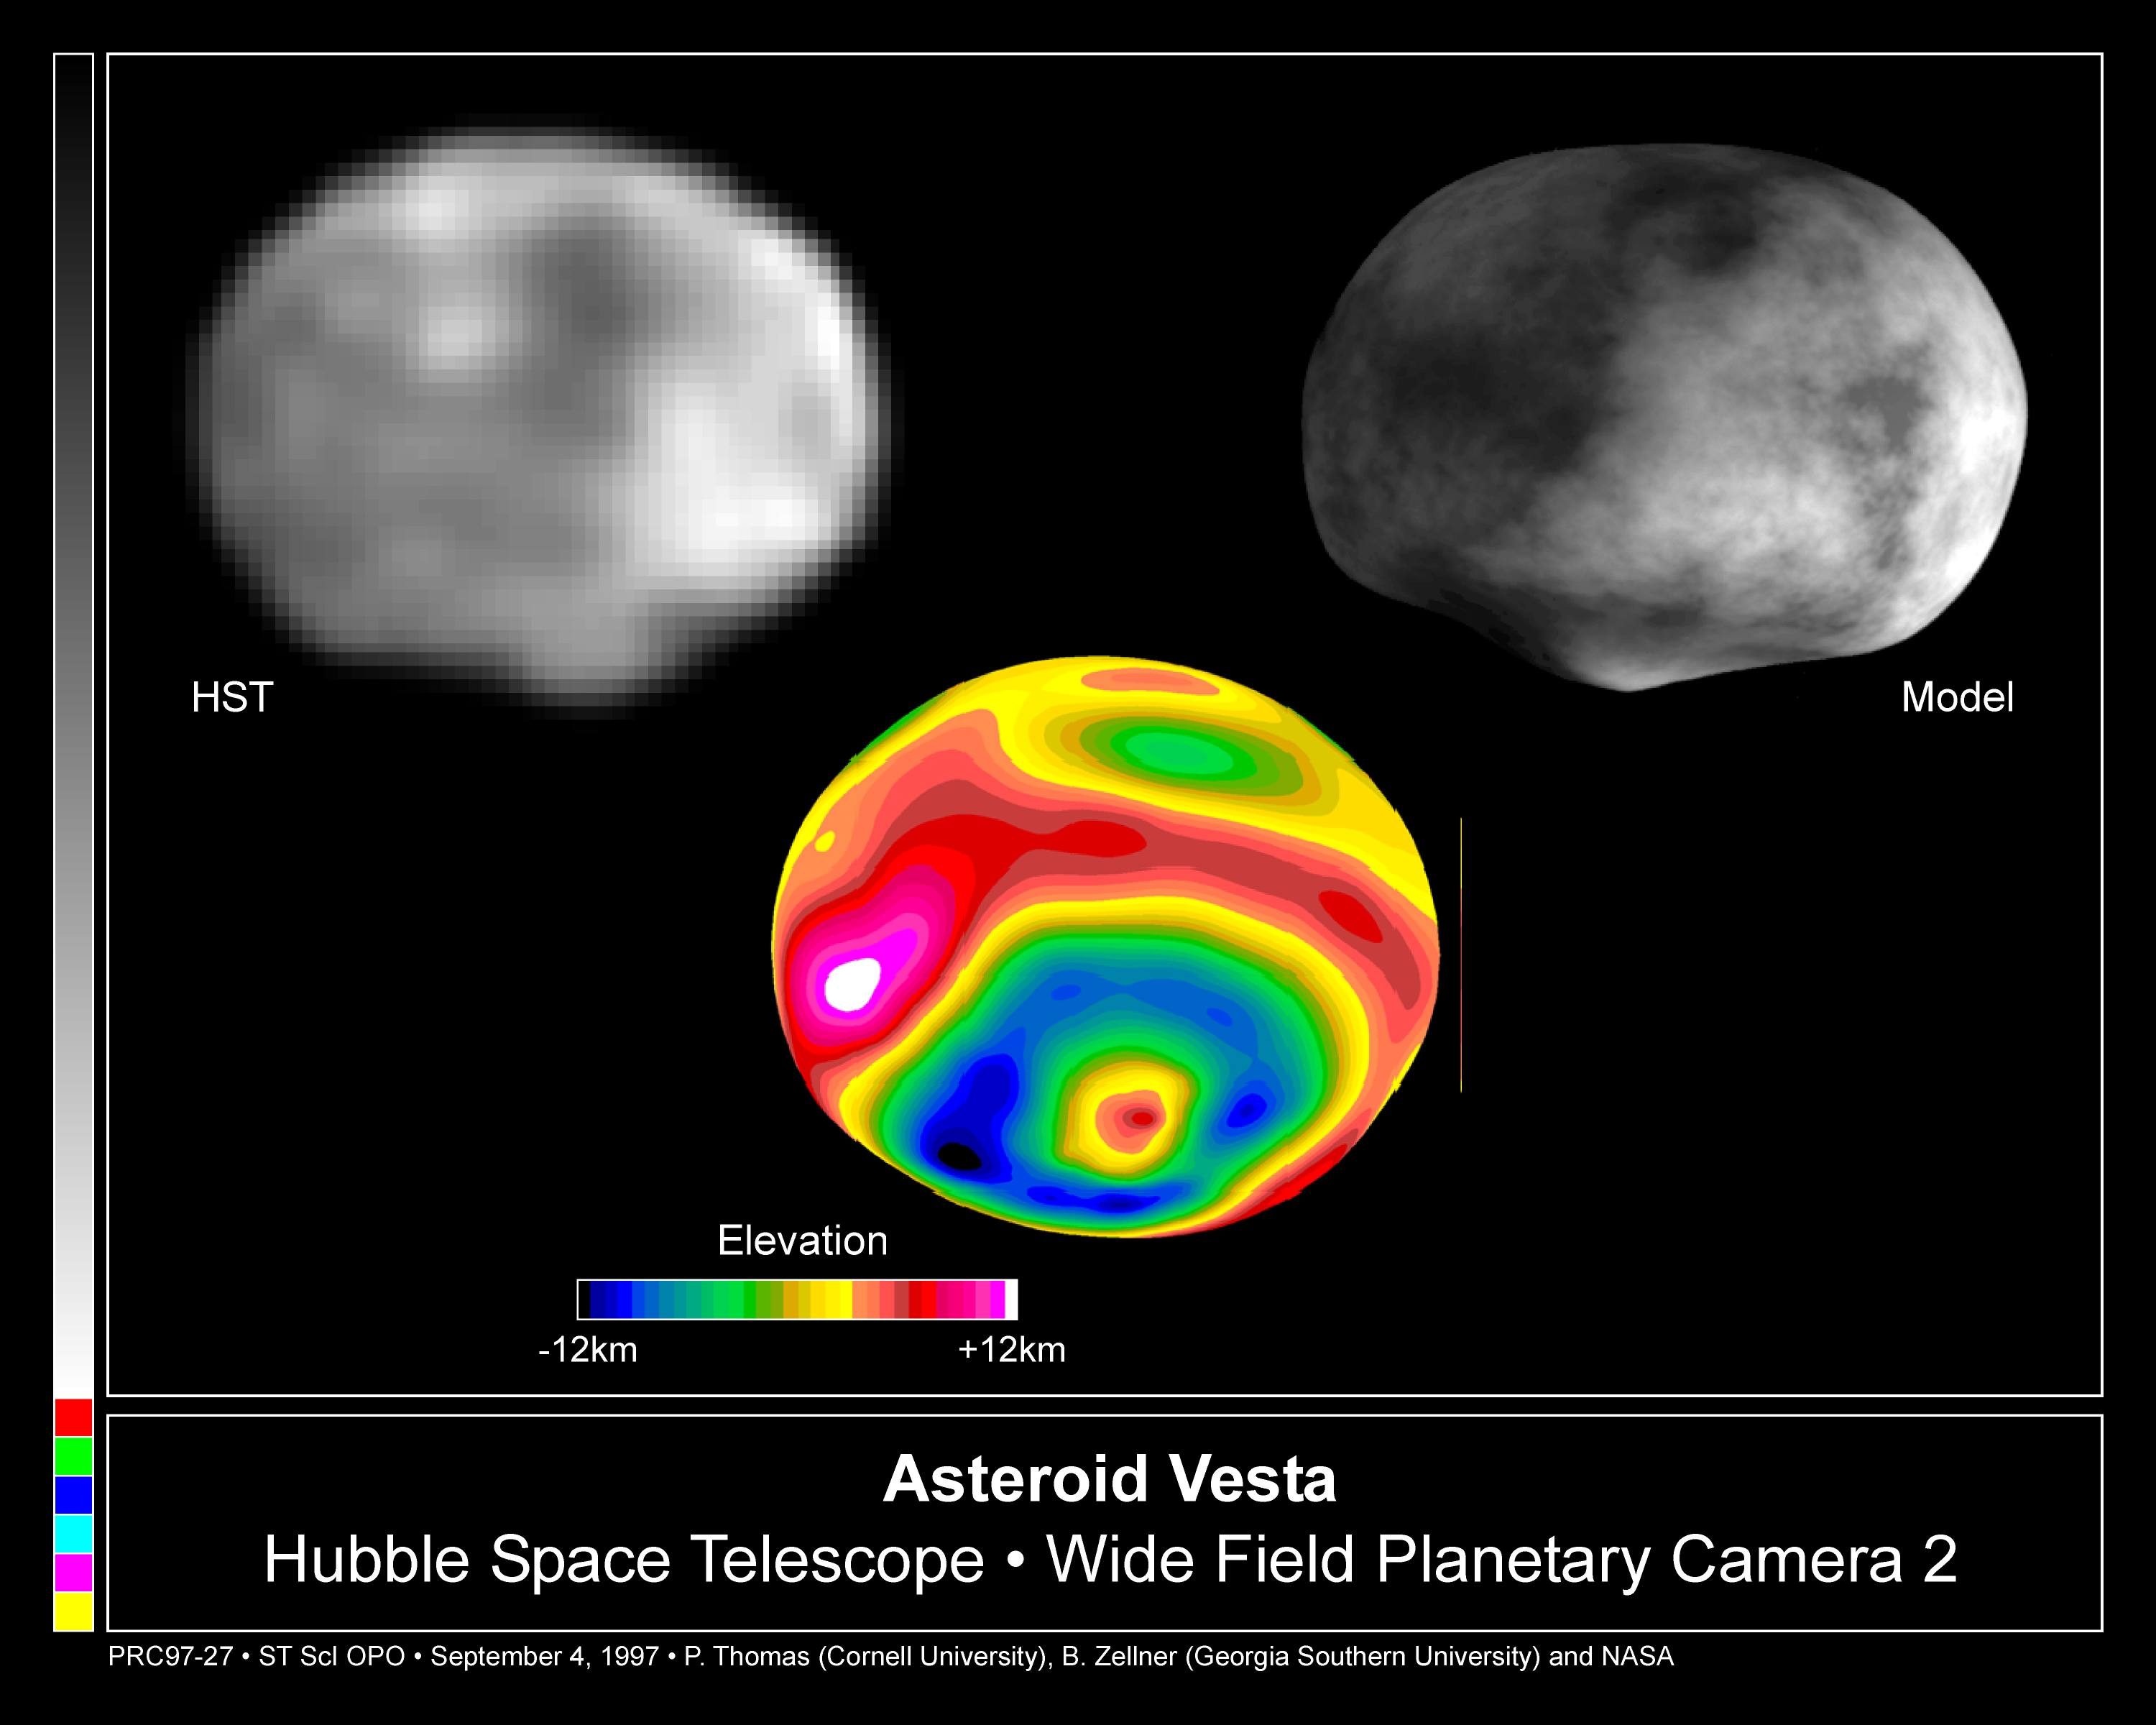

Crater on Asteroid Vesta

A NASA/ESA Hubble Space Telescope image of the asteroid Vesta, taken in May 1996 when the asteroid was 110 million miles (177 million kilometres) from Earth. The asymmetry of the asteroid and 'nub' and the south pole is suggestive that it suffered a large impact event.

Credit: Ben Zellner (Georgia Southern University), Peter Thomas (Cornell University), NASA/ESA